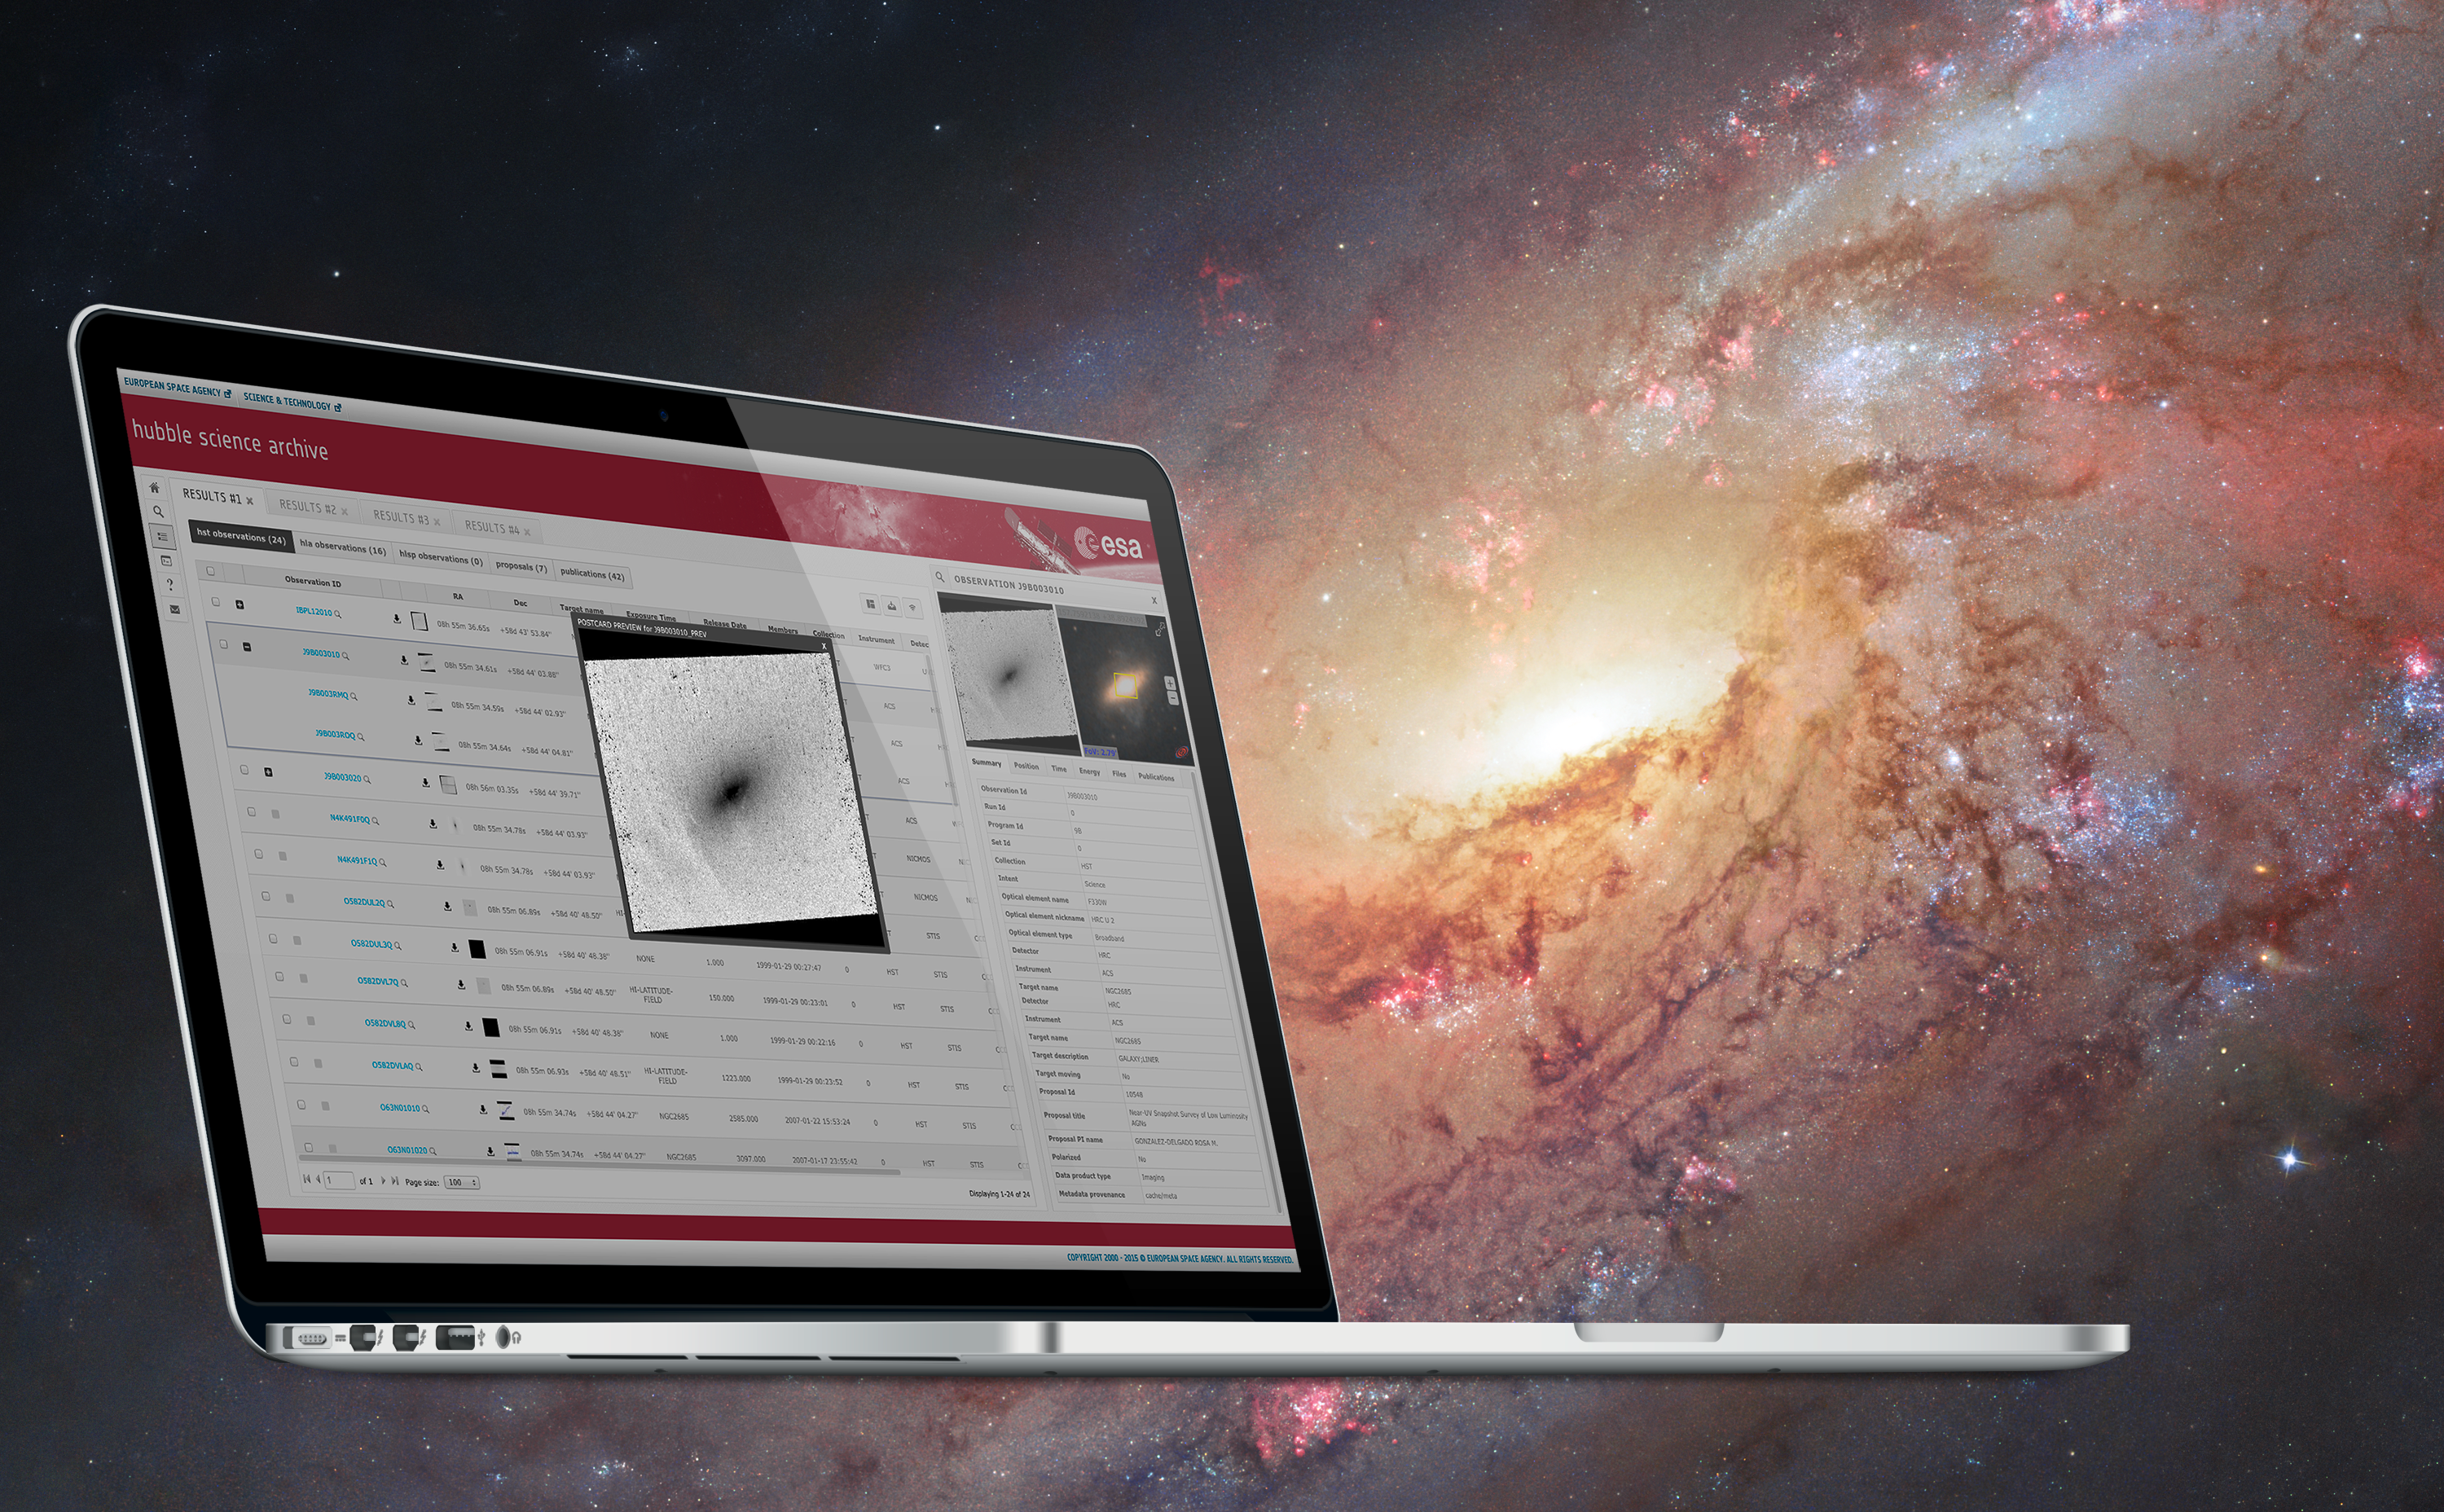

New eHST archive

A screenshot ot the new eHST archive. In the background the galaxy M 108 is visible.

Credit: ESA/Hubble